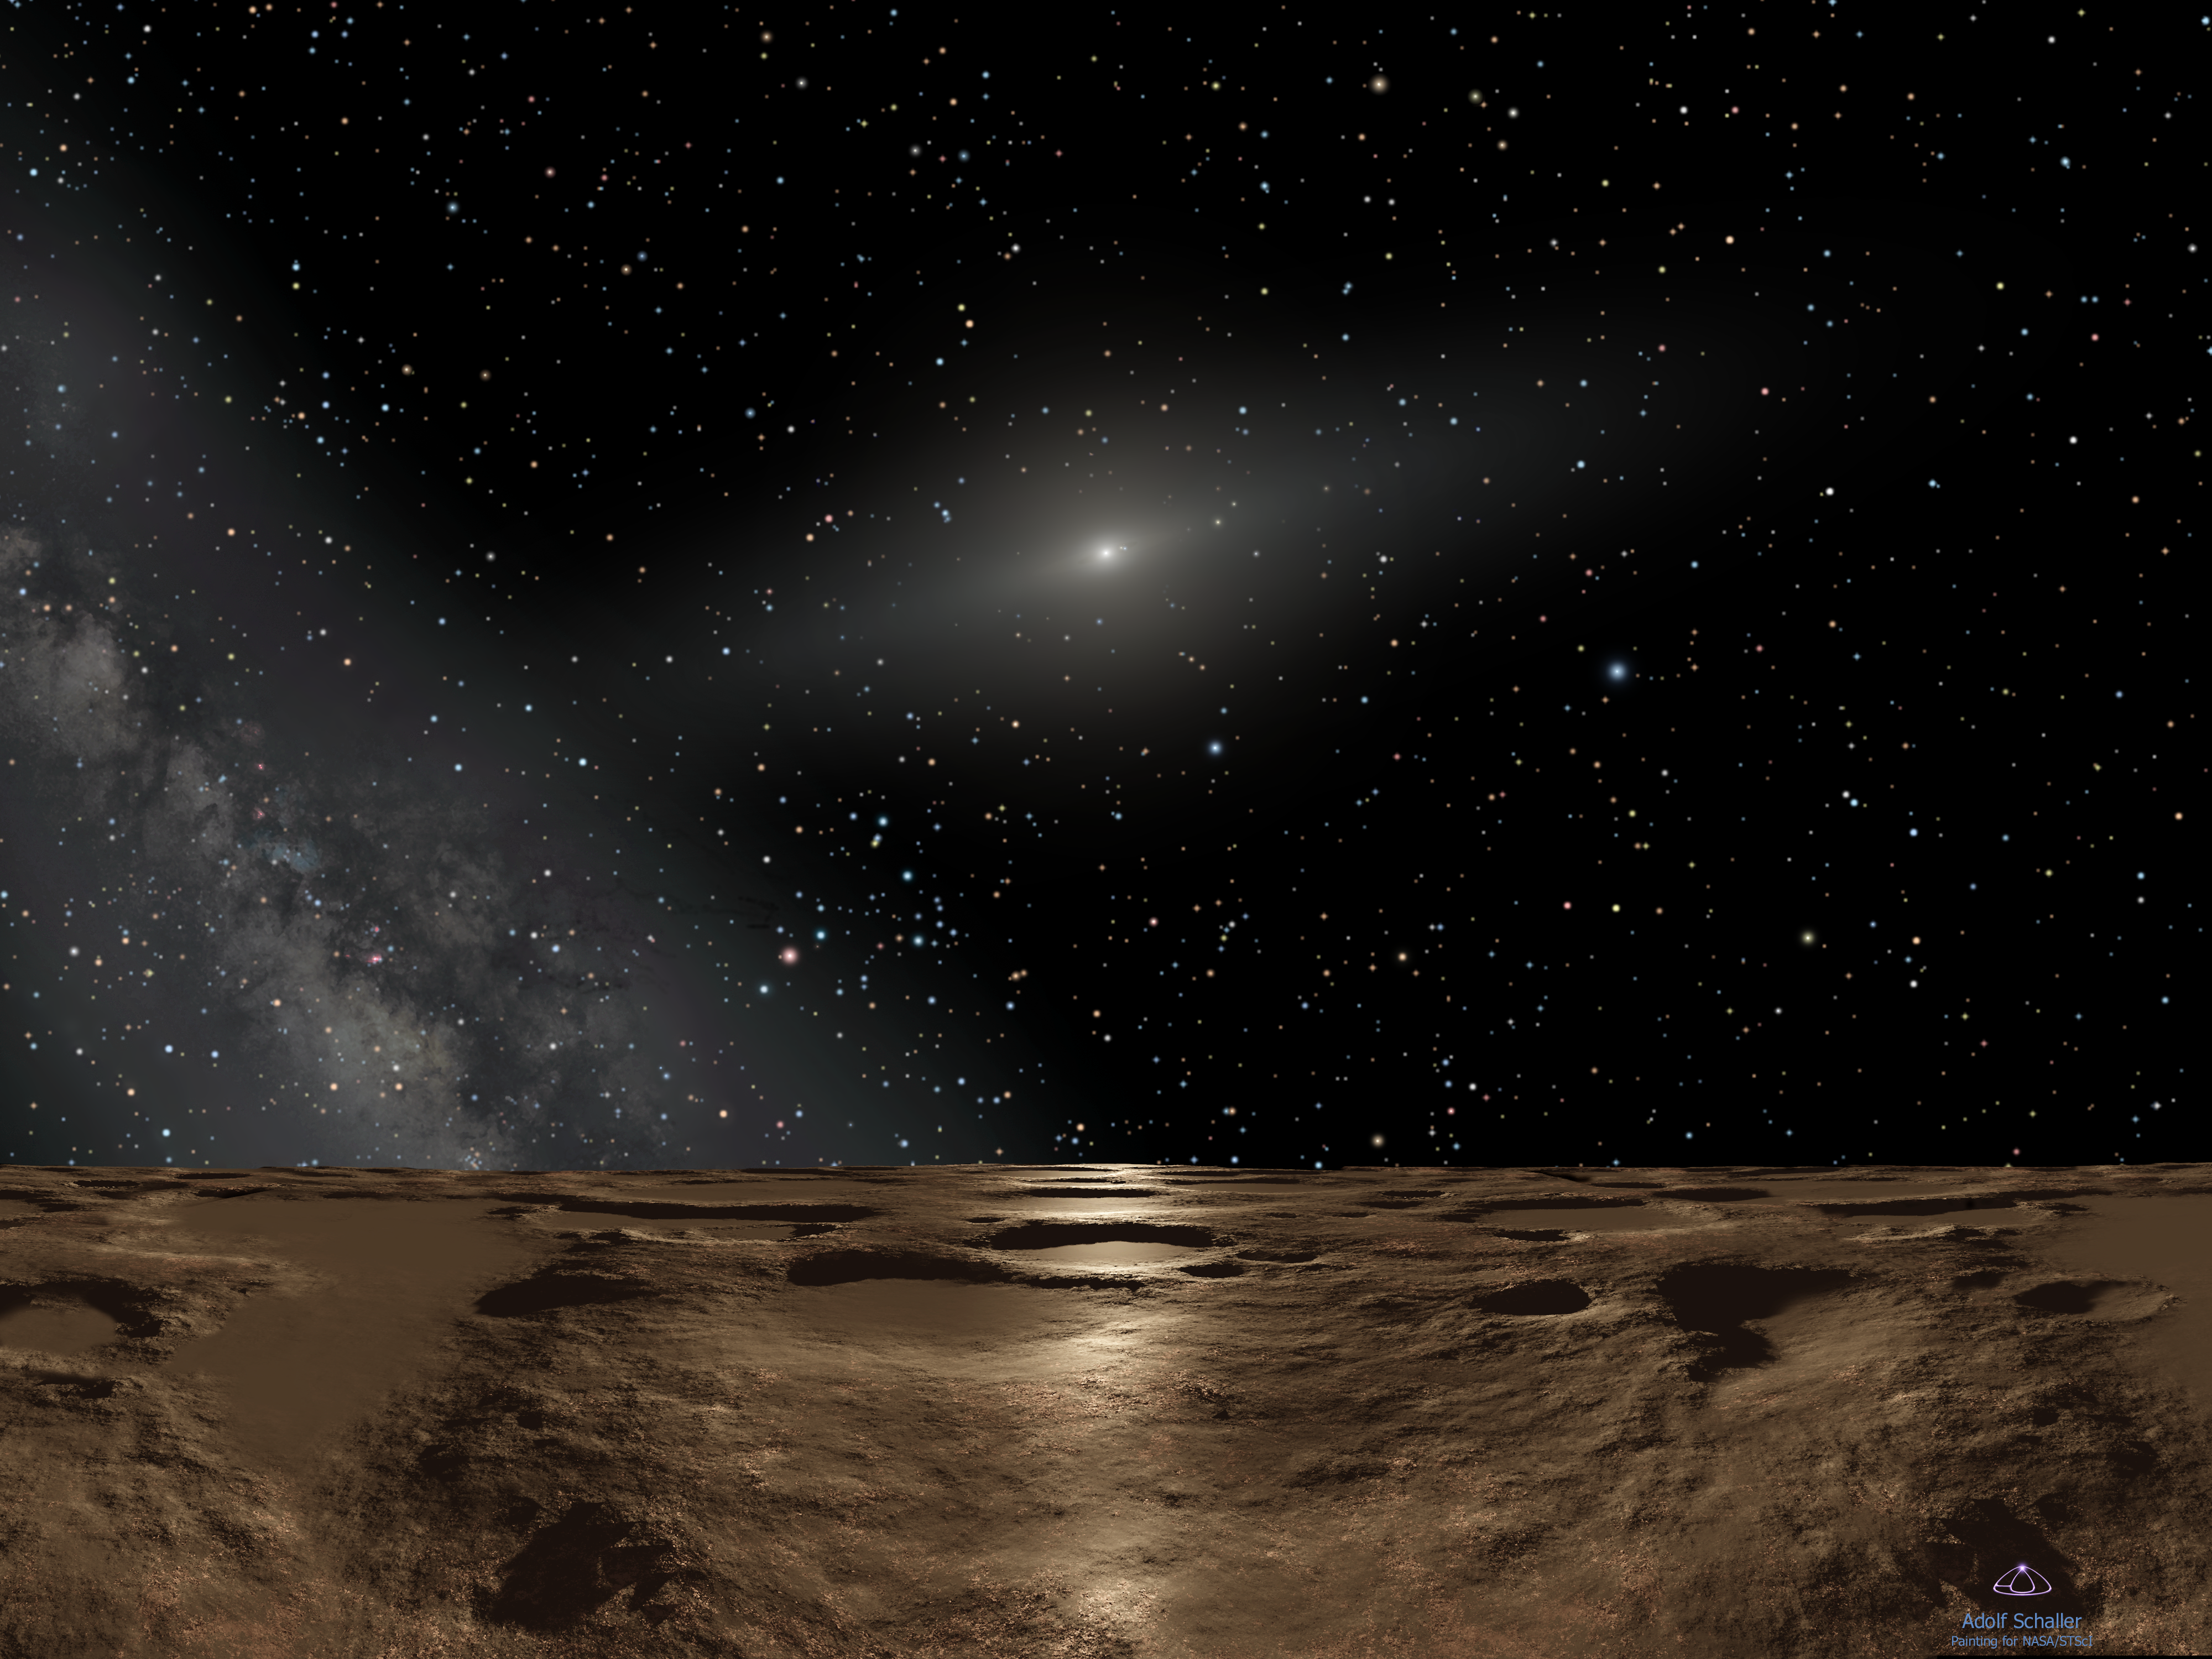

Sedna mystery deepens as Hubble offers best look at farthest planetoid (artist's impression)

This is an artist's impression of noontime on Sedna, the farthest known planetoid from the Sun. Over 8 billion miles away (almost 13 billion kilometres), the Sun is reduced to a brilliant pinpoint of light that is 100 times brighter than the full Moon. (The Sun would actually be the angular size of Saturn as seen from Earth, way too small to be resolved with the human eye.) The dim spindle-shaped glow of dust around the Sun defines the ecliptic plane of the solar system where the major planets dwell. To the left, the hazy plane of our Galaxy, the Milky Way, stretches into the sky. The background constellations are Virgo and Libra.

At this distance the Sun's feeble rays are nearly one four-thousandth the intensity of what they are at Earth. This means that Sedna is eternally cold at minus 400 degrees Fahrenheit, which means that the planetoid is airless and icy. Life, as we know it, could never live here. But if anything could survive, it would have an intriguing global view of the entire solar system. A fifth-magnitude object, barely three degrees from the Sun (the pinpoint at the two o'clock position) is Jupiter. Saturn is also visible as a dim star. Earth would be only half a degree from the Sun and, at ninth magnitude, only be visible in powerful binoculars. To our imaginary "Sednian" astronomers, all the planets would be in inferior orbits (meaning interior to Sedna's orbit). This means they would best be seen in the predawn morning sky and post sunset evening sky, but never at midnight.

Credit: NASA, ESA and Adolf Schaller